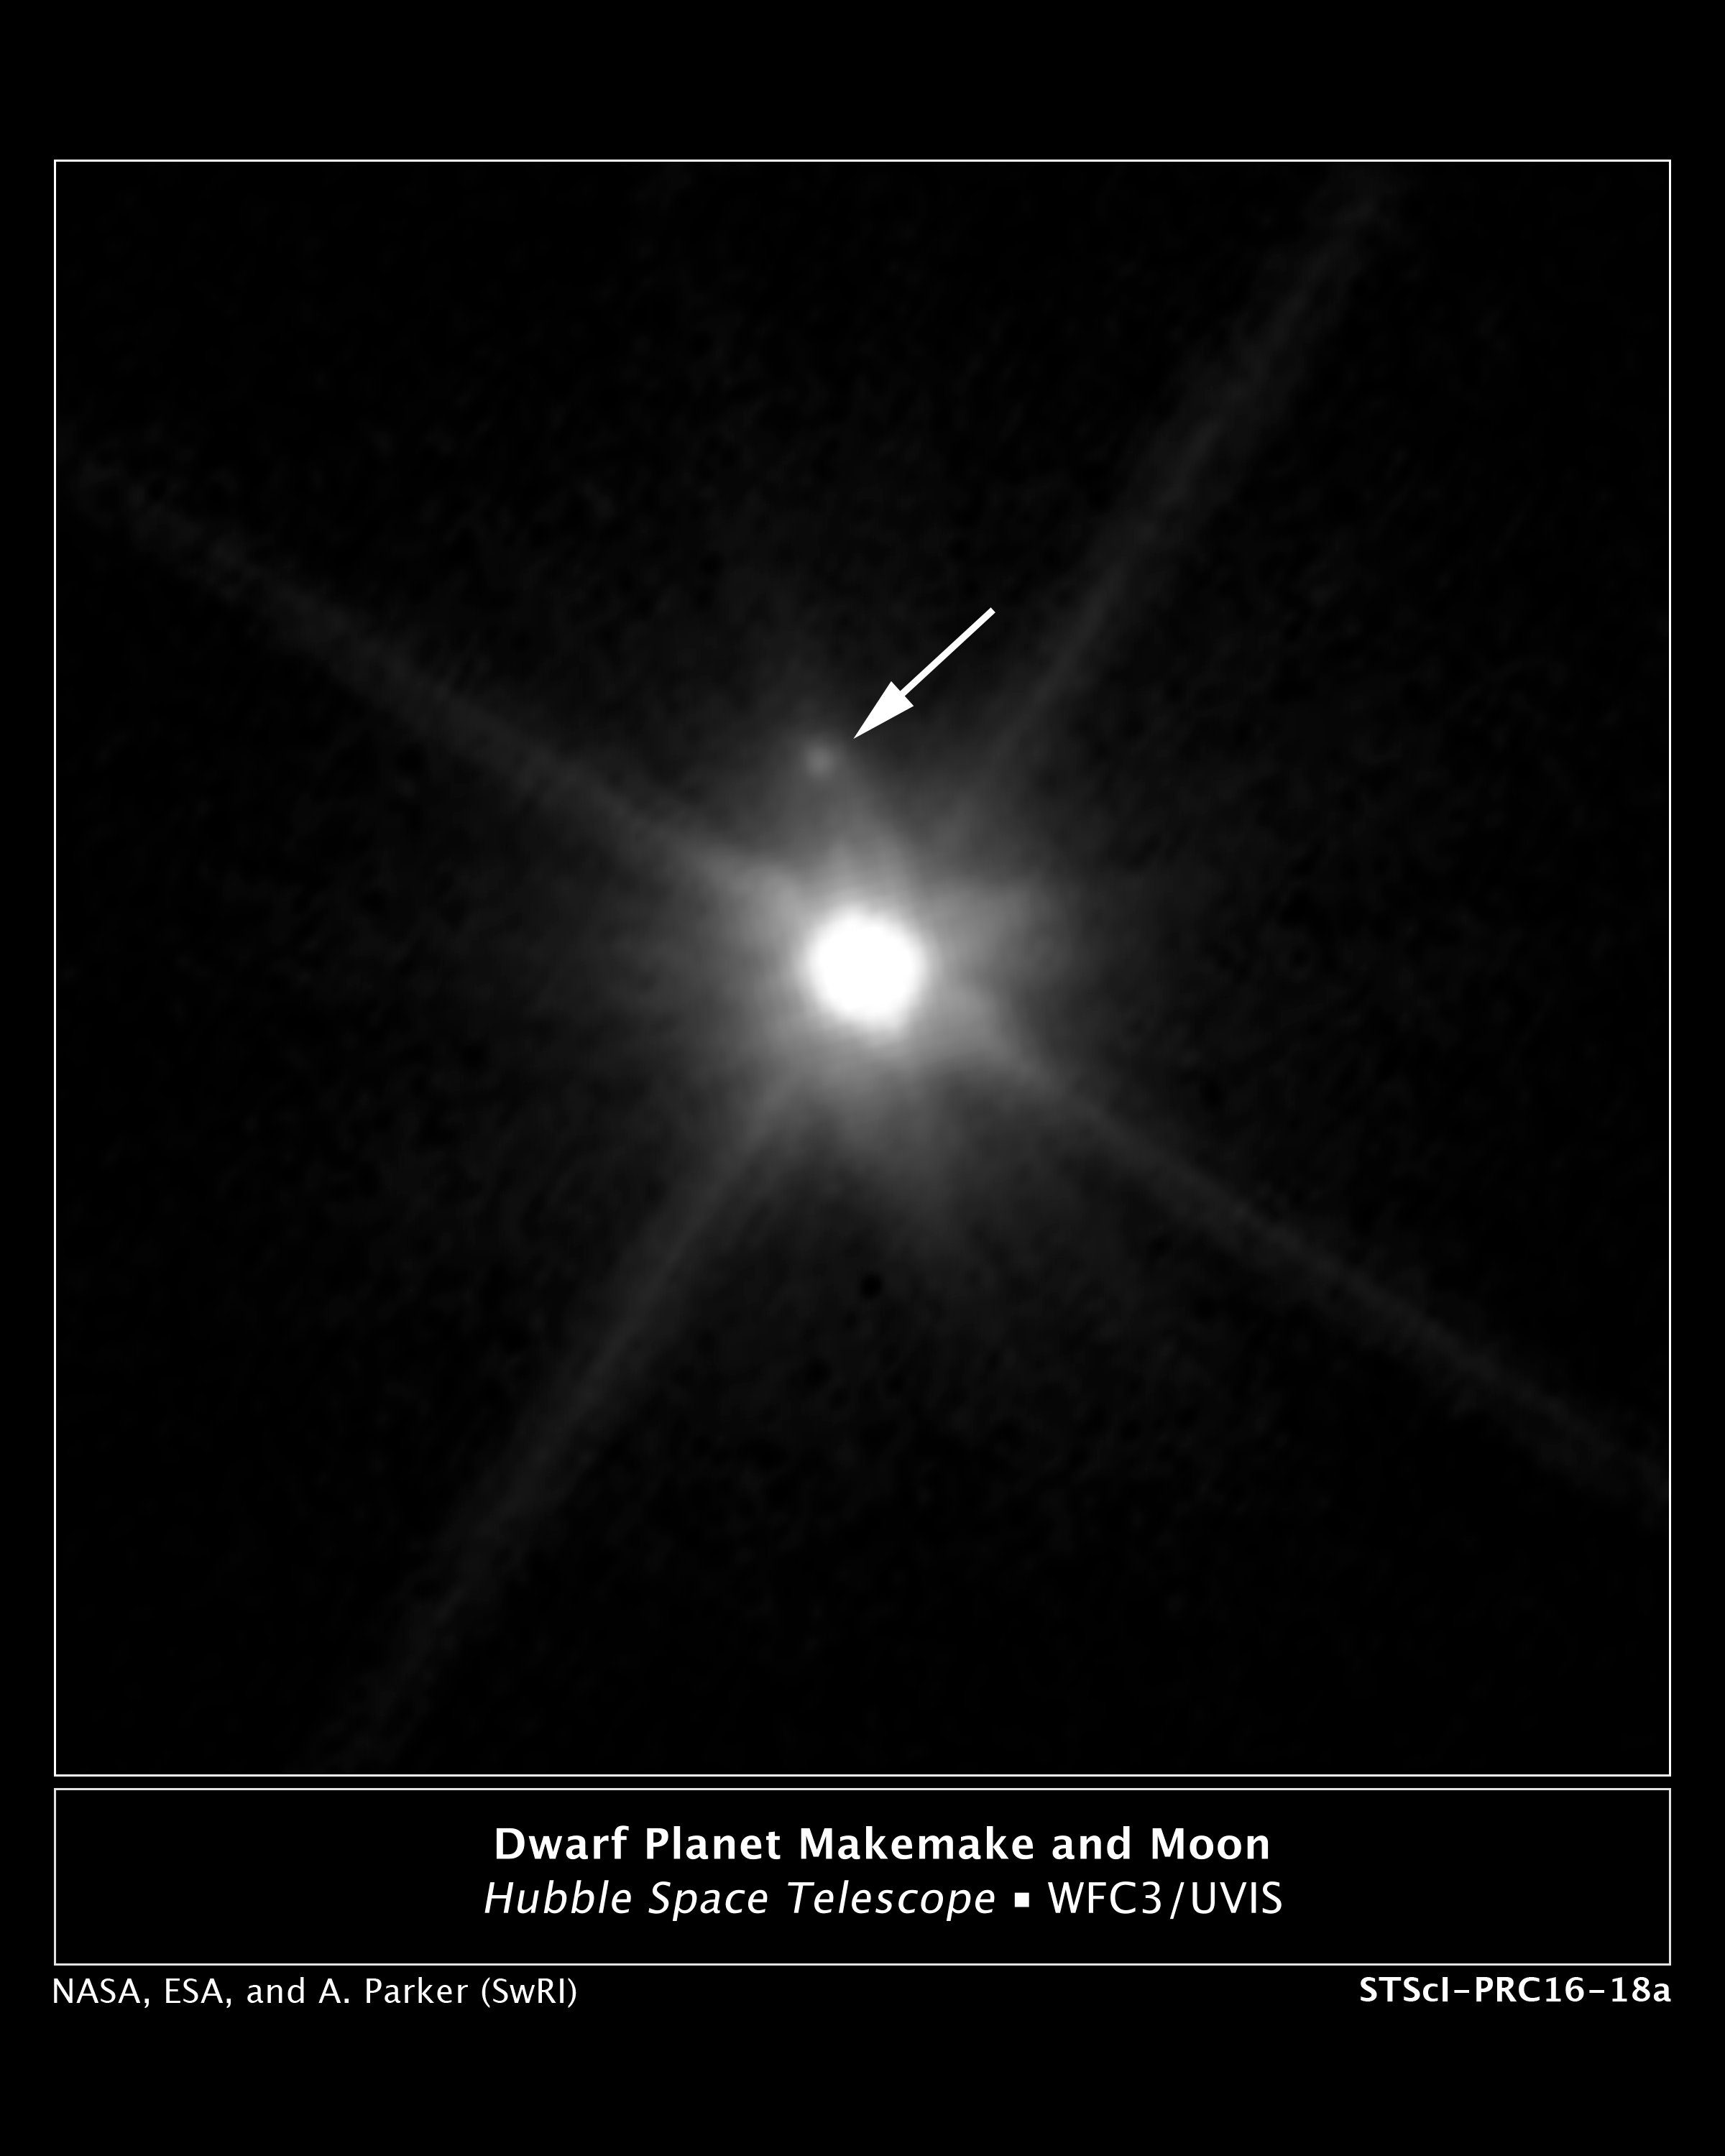

Makemake and its moon (annotated)

This Hubble Space Telescope image reveals the first moon ever discovered around the dwarf planet Makemake. The tiny moon, located just above Makemake in this image, is barely visible because it is almost lost in the glare of the very bright dwarf planet. The moon, nicknamed MK 2, is roughly 160 kilometres wide and orbits about 21,000 kilometres from Makemake. Makemake is 1,300 times brighter than its moon and is also much larger, at 2,200 kilometres across.

The Makemake system is more than 50 times farther than the Earth is from the Sun. The pair resides on the outskirts of our Solar System in the Kuiper Belt, a vast region of frozen debris from the construction of our Solar System 4.5 billion years ago.

Previous searches for a moon around Makemake turned up empty. The moon may be in an edge-on orbit, so part of the time it gets lost in the bright glare of Makemake.

Hubble's sharp-eyed Wide Field Camera 3 made the observation in April 2015.

Credit: NASA, ESA, and A. Parker and M. Buie (Southwest Research Institute)